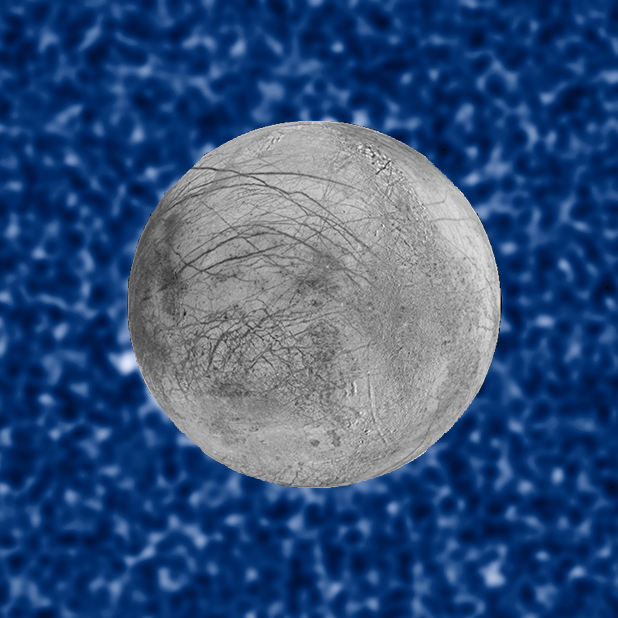

Plume Erupting From Europa – 22 February 2016

These composite image shows a suspected plume of material erupting from Jupiter's icy moon Europa. The plume, photographed in ultraviolet light by the NASA/ESA Hubble Space Telescope, was seen in silhouette as the moon passed in front of Jupiter.

The plume was observed on 22 February 2016 and is estimated to be about 100 kilometres high. The snapshot of Europa, superimposed on the Hubble image, was assembled from data from NASA's Galileo mission to Jupiter.

Credit: NASA, ESA, W. Sparks (STScI), and the USGS Astrogeology Science Center